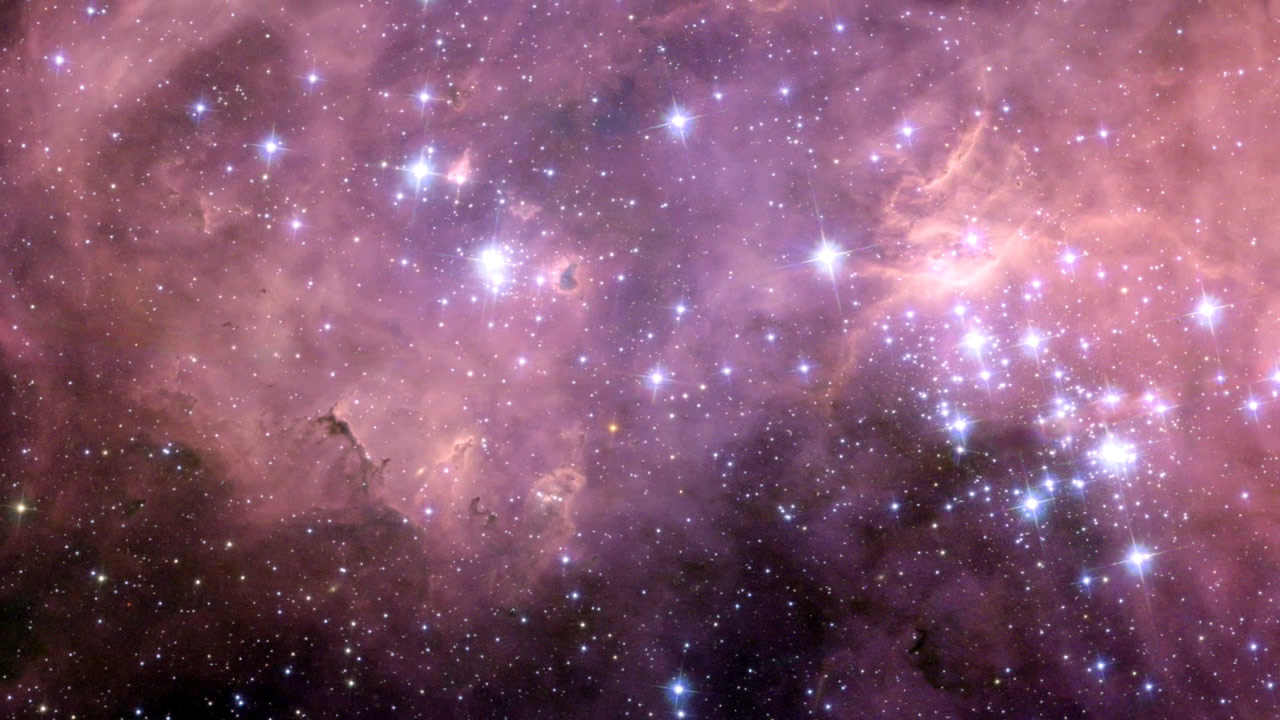

Bubbles and baby stars

This image is a screen shot from Hubblecast 37 featuring a spectacular new NASA/ESA Hubble Space Telescope image — one of the largest ever released of a star-forming region. It highlights N11, part of a complex network of gas clouds and star clusters within our neighbouring galaxy, the Large Magellanic Cloud. This region of energetic star formation is one of the most active in the nearby Universe. Read more about it in the press release heic1011.

Credit: NASA, ESA and Jesús Maíz Apellániz (Instituto de Astrofísica de Andalucía, Spain)